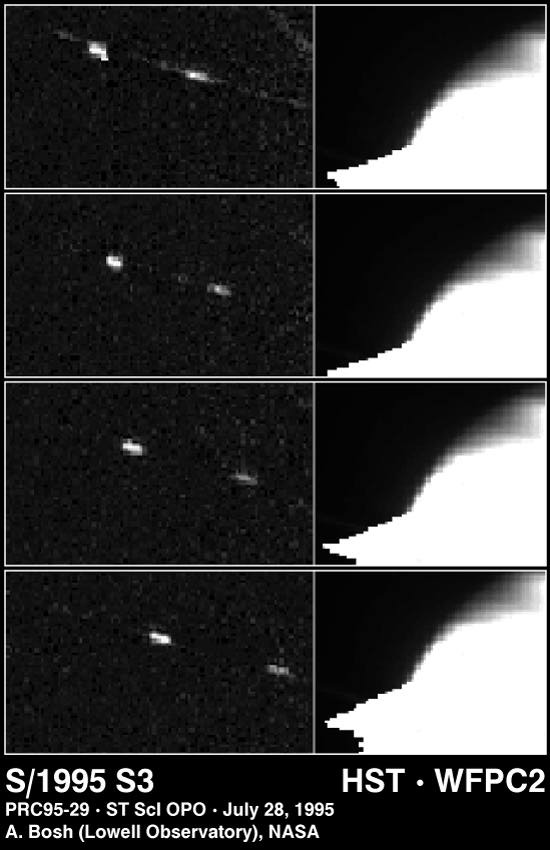

New saturnian moon discovered

This four-picture sequence (spanning 30 minutes) shows one of four new moons discovered by the Hubble Space Telescope, in images taken of Saturn on May 22, 1995, when Saturn's rings were tilted edge-on to Earth.

Credit: Amanda S. Bosh (Lowell Observatory), Andrew S. Rivkin (Lowell Observatory and University of Arizona/Lunar Planetary Lab), High Speed Photometer Instrument Definition Team (R.C. Bless, PI), and NASA/ESA